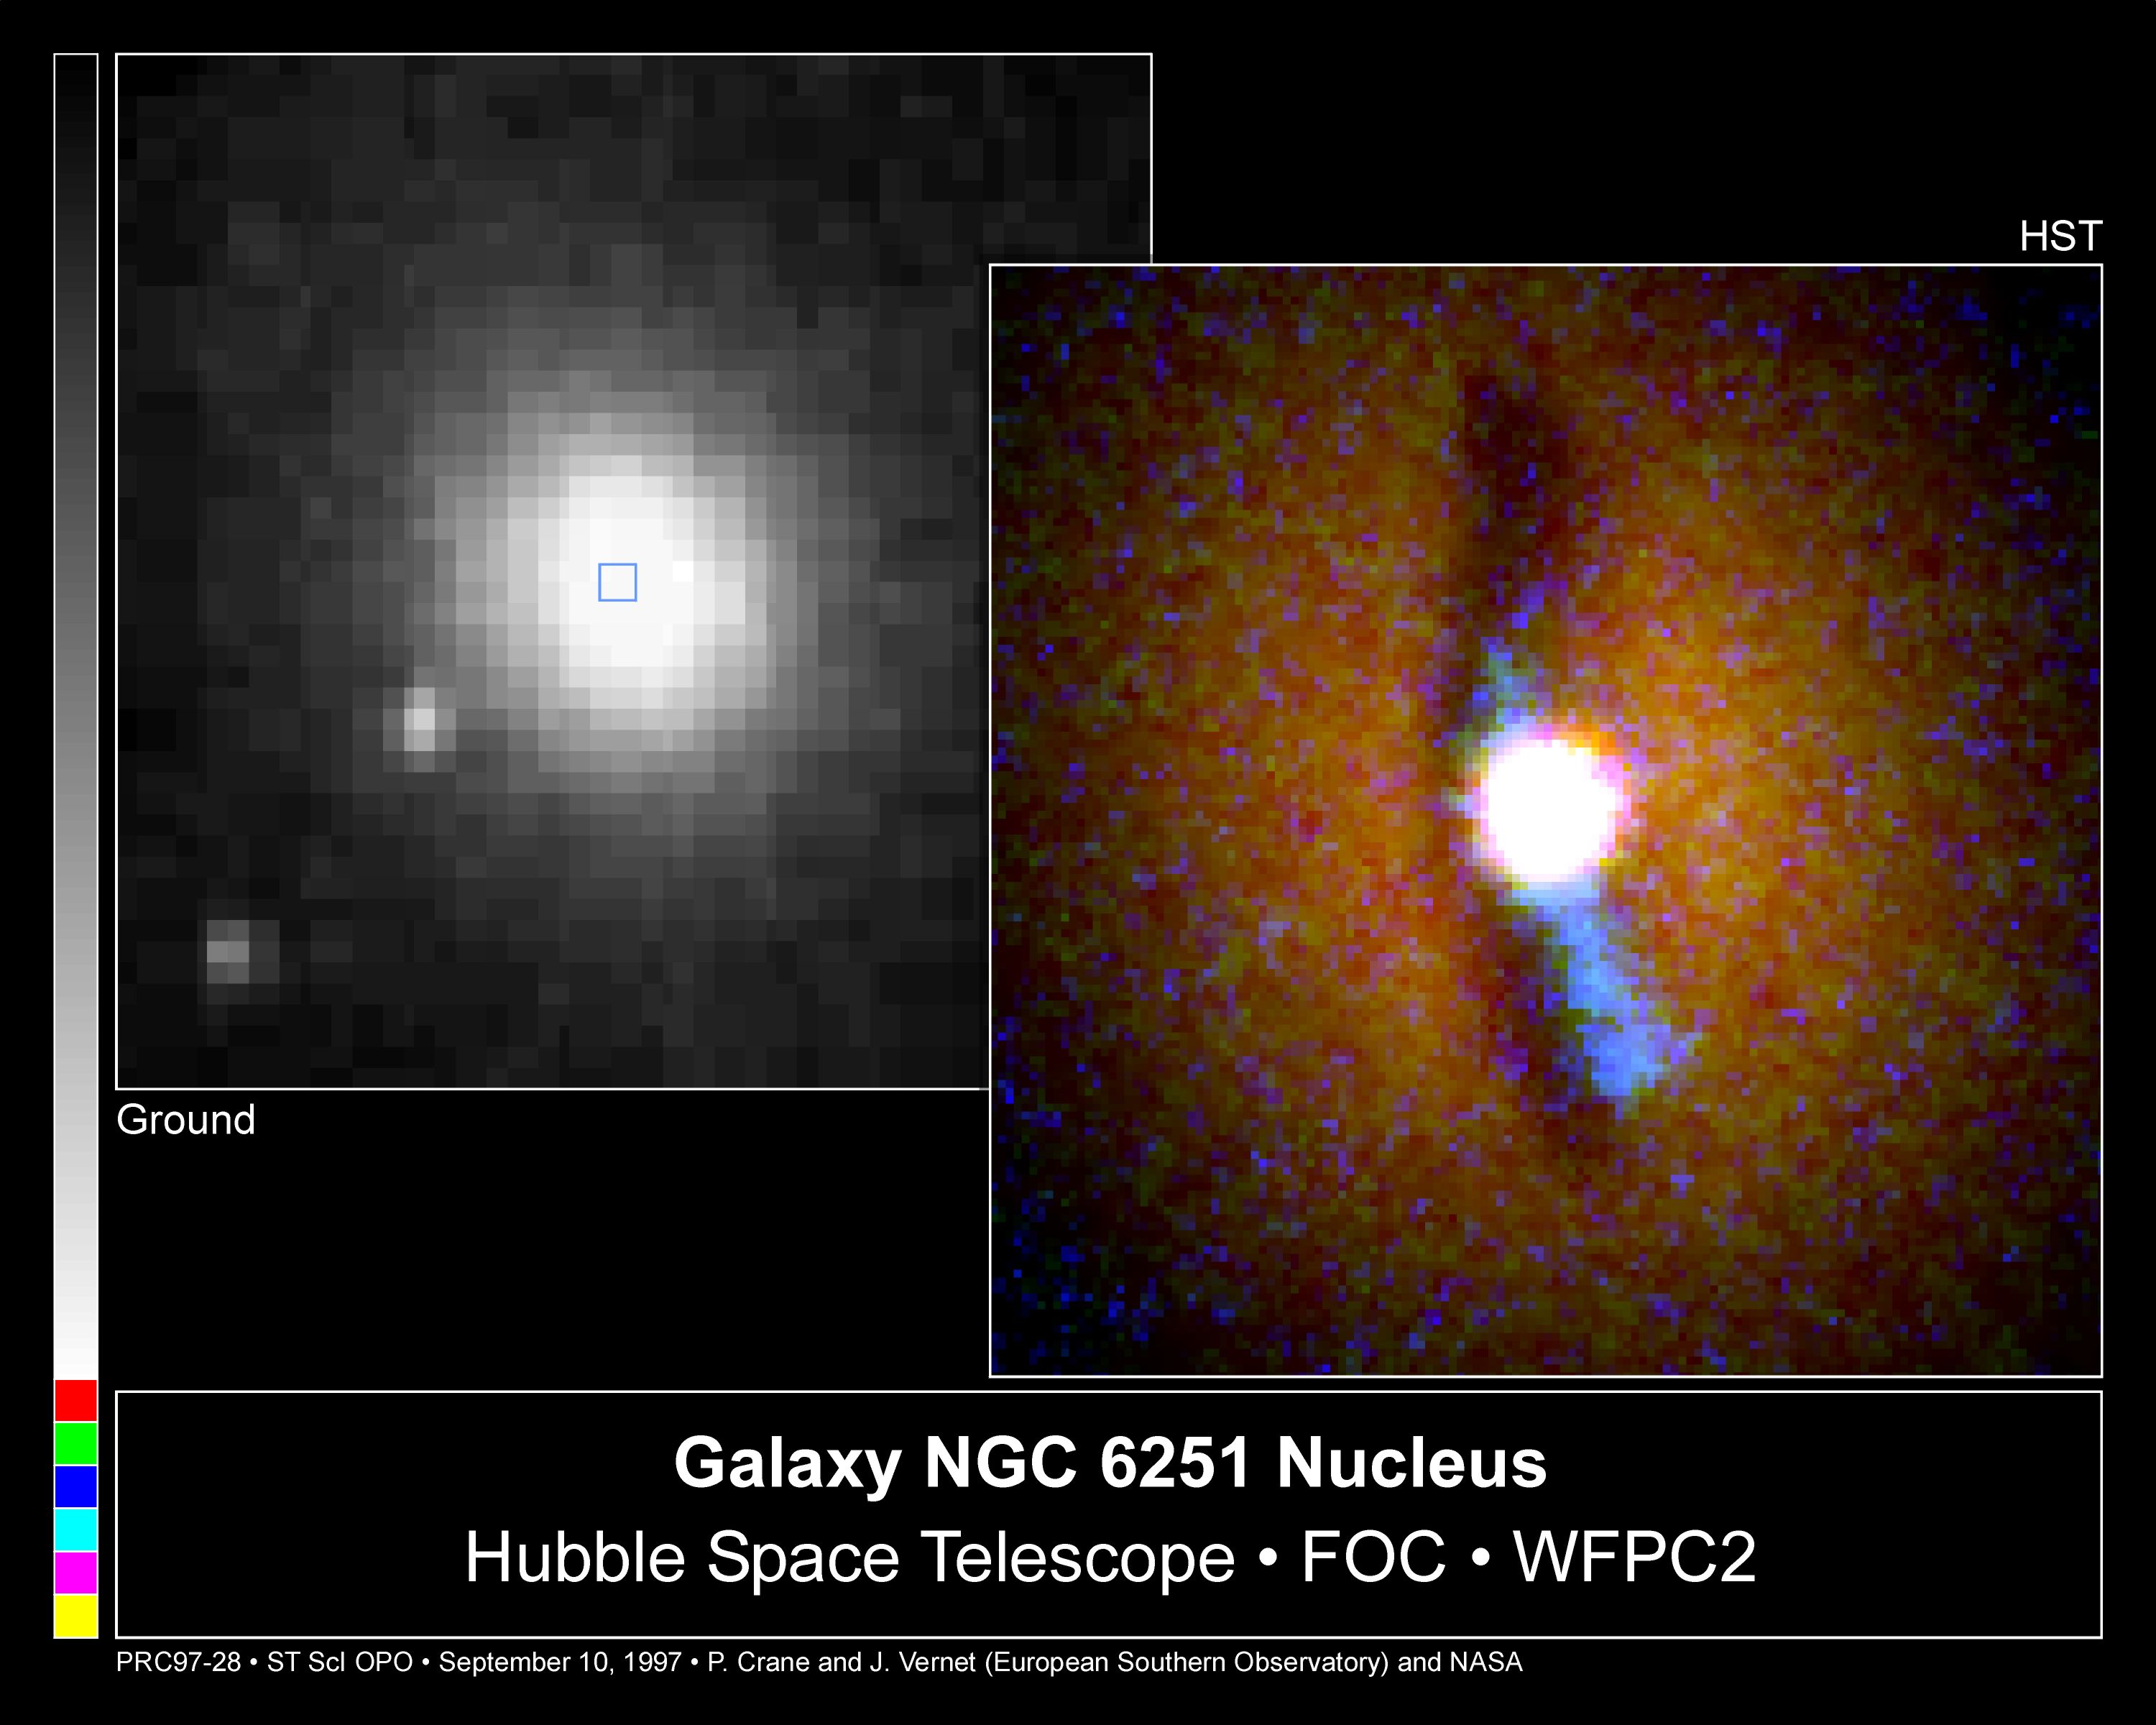

Galaxy NGC 6251 Nucleus

The NASA/ESA Hubble Space Telescope has provided a never-before-seen view of a warped disk flooded with a torrent of ultraviolet light from hot gas trapped around a suspected massive black hole.

Credit: Philippe Crane (European Southern Observatory), and NASA/ESA